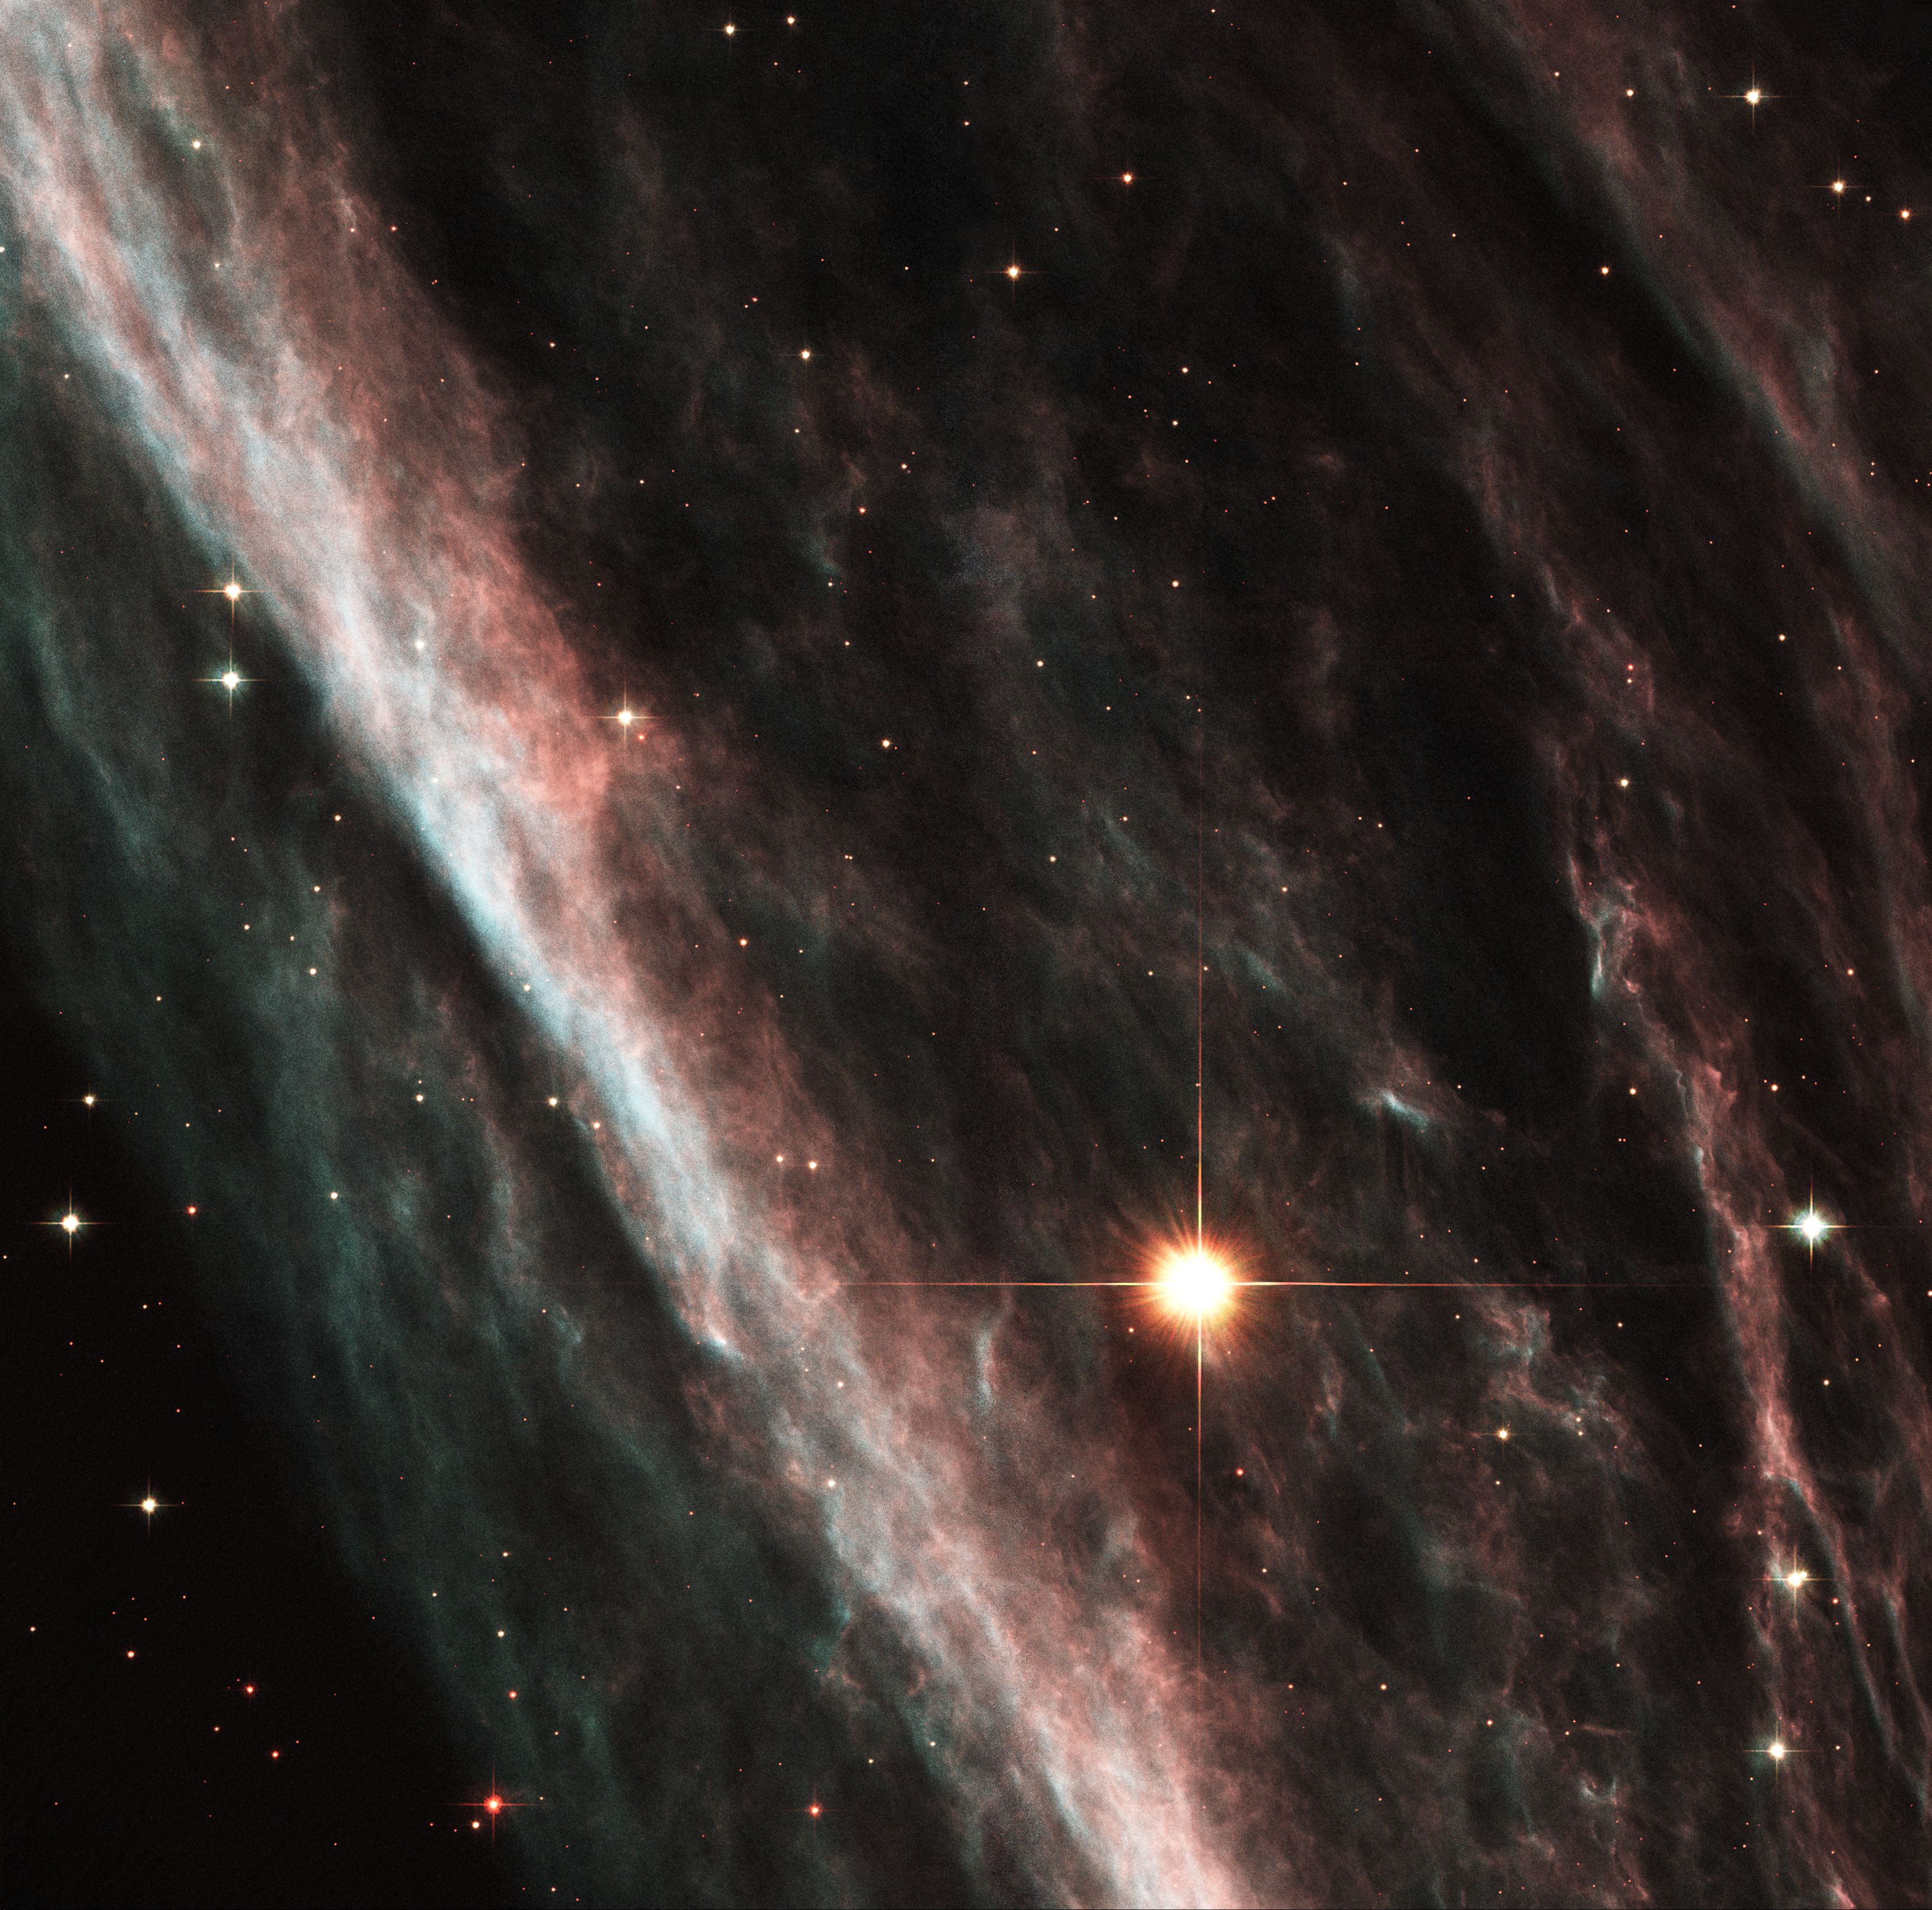

Supernova Shock Wave Paints Cosmic Portrait

Remnants from a star that exploded thousands of years ago created a celestial abstract portrait, as captured in this NASA/ESA Hubble Space Telescope image of the Pencil Nebula.

Officially known as NGC 2736, the Pencil Nebula is part of the huge Vela supernova remnant, located in the southern constellation Vela. Discovered by Sir John Herschel in the 1840s, the nebula's linear appearance triggered its popular name. The nebula's shape suggests that it is part of the supernova shock wave that recently encountered a region of dense gas. It is this interaction that causes the nebula to glow, appearing like a rippled sheet.

Credit: NASA/ESA and The Hubble Heritage Team (STScI/AURA)